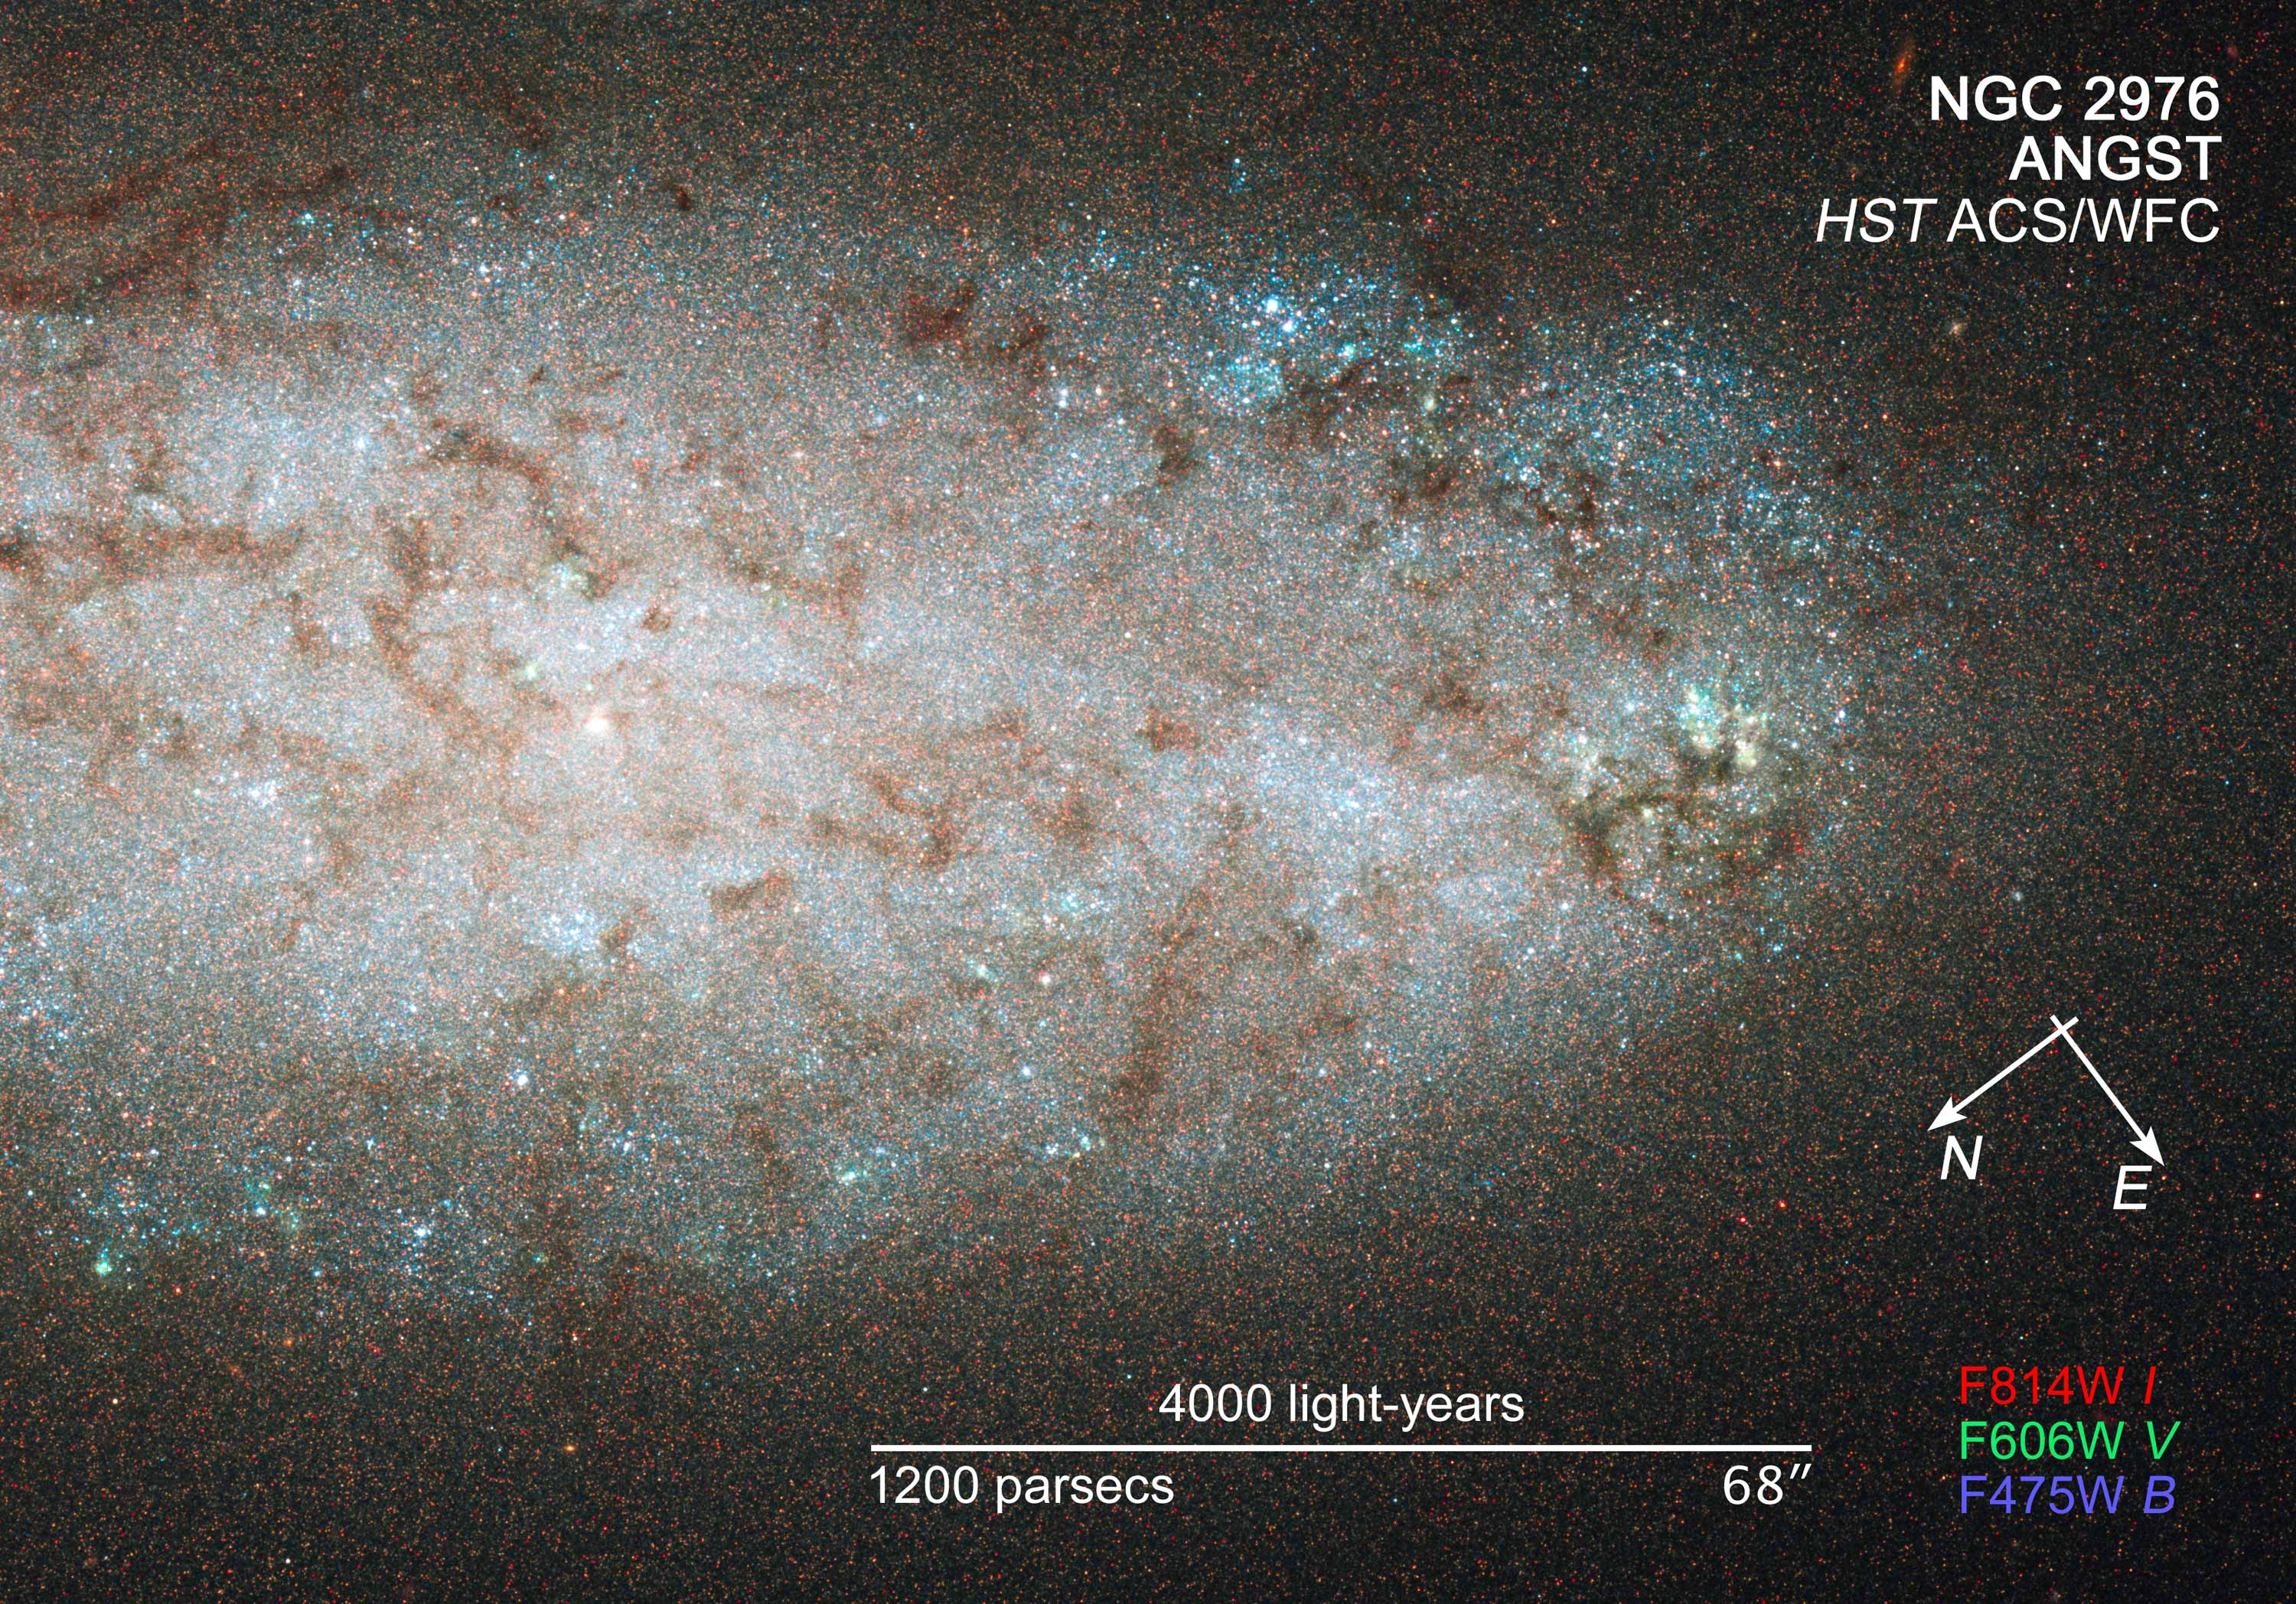

Compass and scale image for NGC 2976

Compass and scale image for NGC 2976.

Credit: NASA, ESA, and Z. Levay (STScI). Science Credit: NASA, ESA, J. Dalcanton and B. Williams (University of Washington)